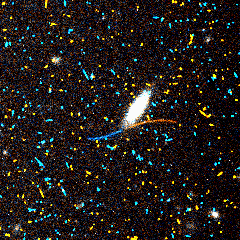

Serendipitously discovered asteroids

Here is an asteroid with a visual magnitude of 21.8 passing a galaxy in the constellation Leo. The trail is seen in two consecutive exposures, the first shown in blue and the second in red. This asteroid has a diameter of half a mile (0.8 kilometers), and was located 188 million miles from Earth and 233 million miles from the sun.

Credit: R. Evans and K. Stapelfeldt (Jet Propulsion Laboratory) and NASA/ESA